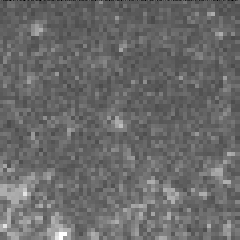

Cepheid variable star in galaxy M100

The interval it takes for the Cepheid to complete one pulsation is a direct indication of the stars's intrinsic brightness. This value can be used to make a precise measurement of the galaxy's distance, which turns out to be 56 million light-years from Earth. This image was taken on May 16, 1994.

Credit: Dr. Wendy L. Freedman, Observatories of the Carnegie Institution of Washington, and NASA/ESA